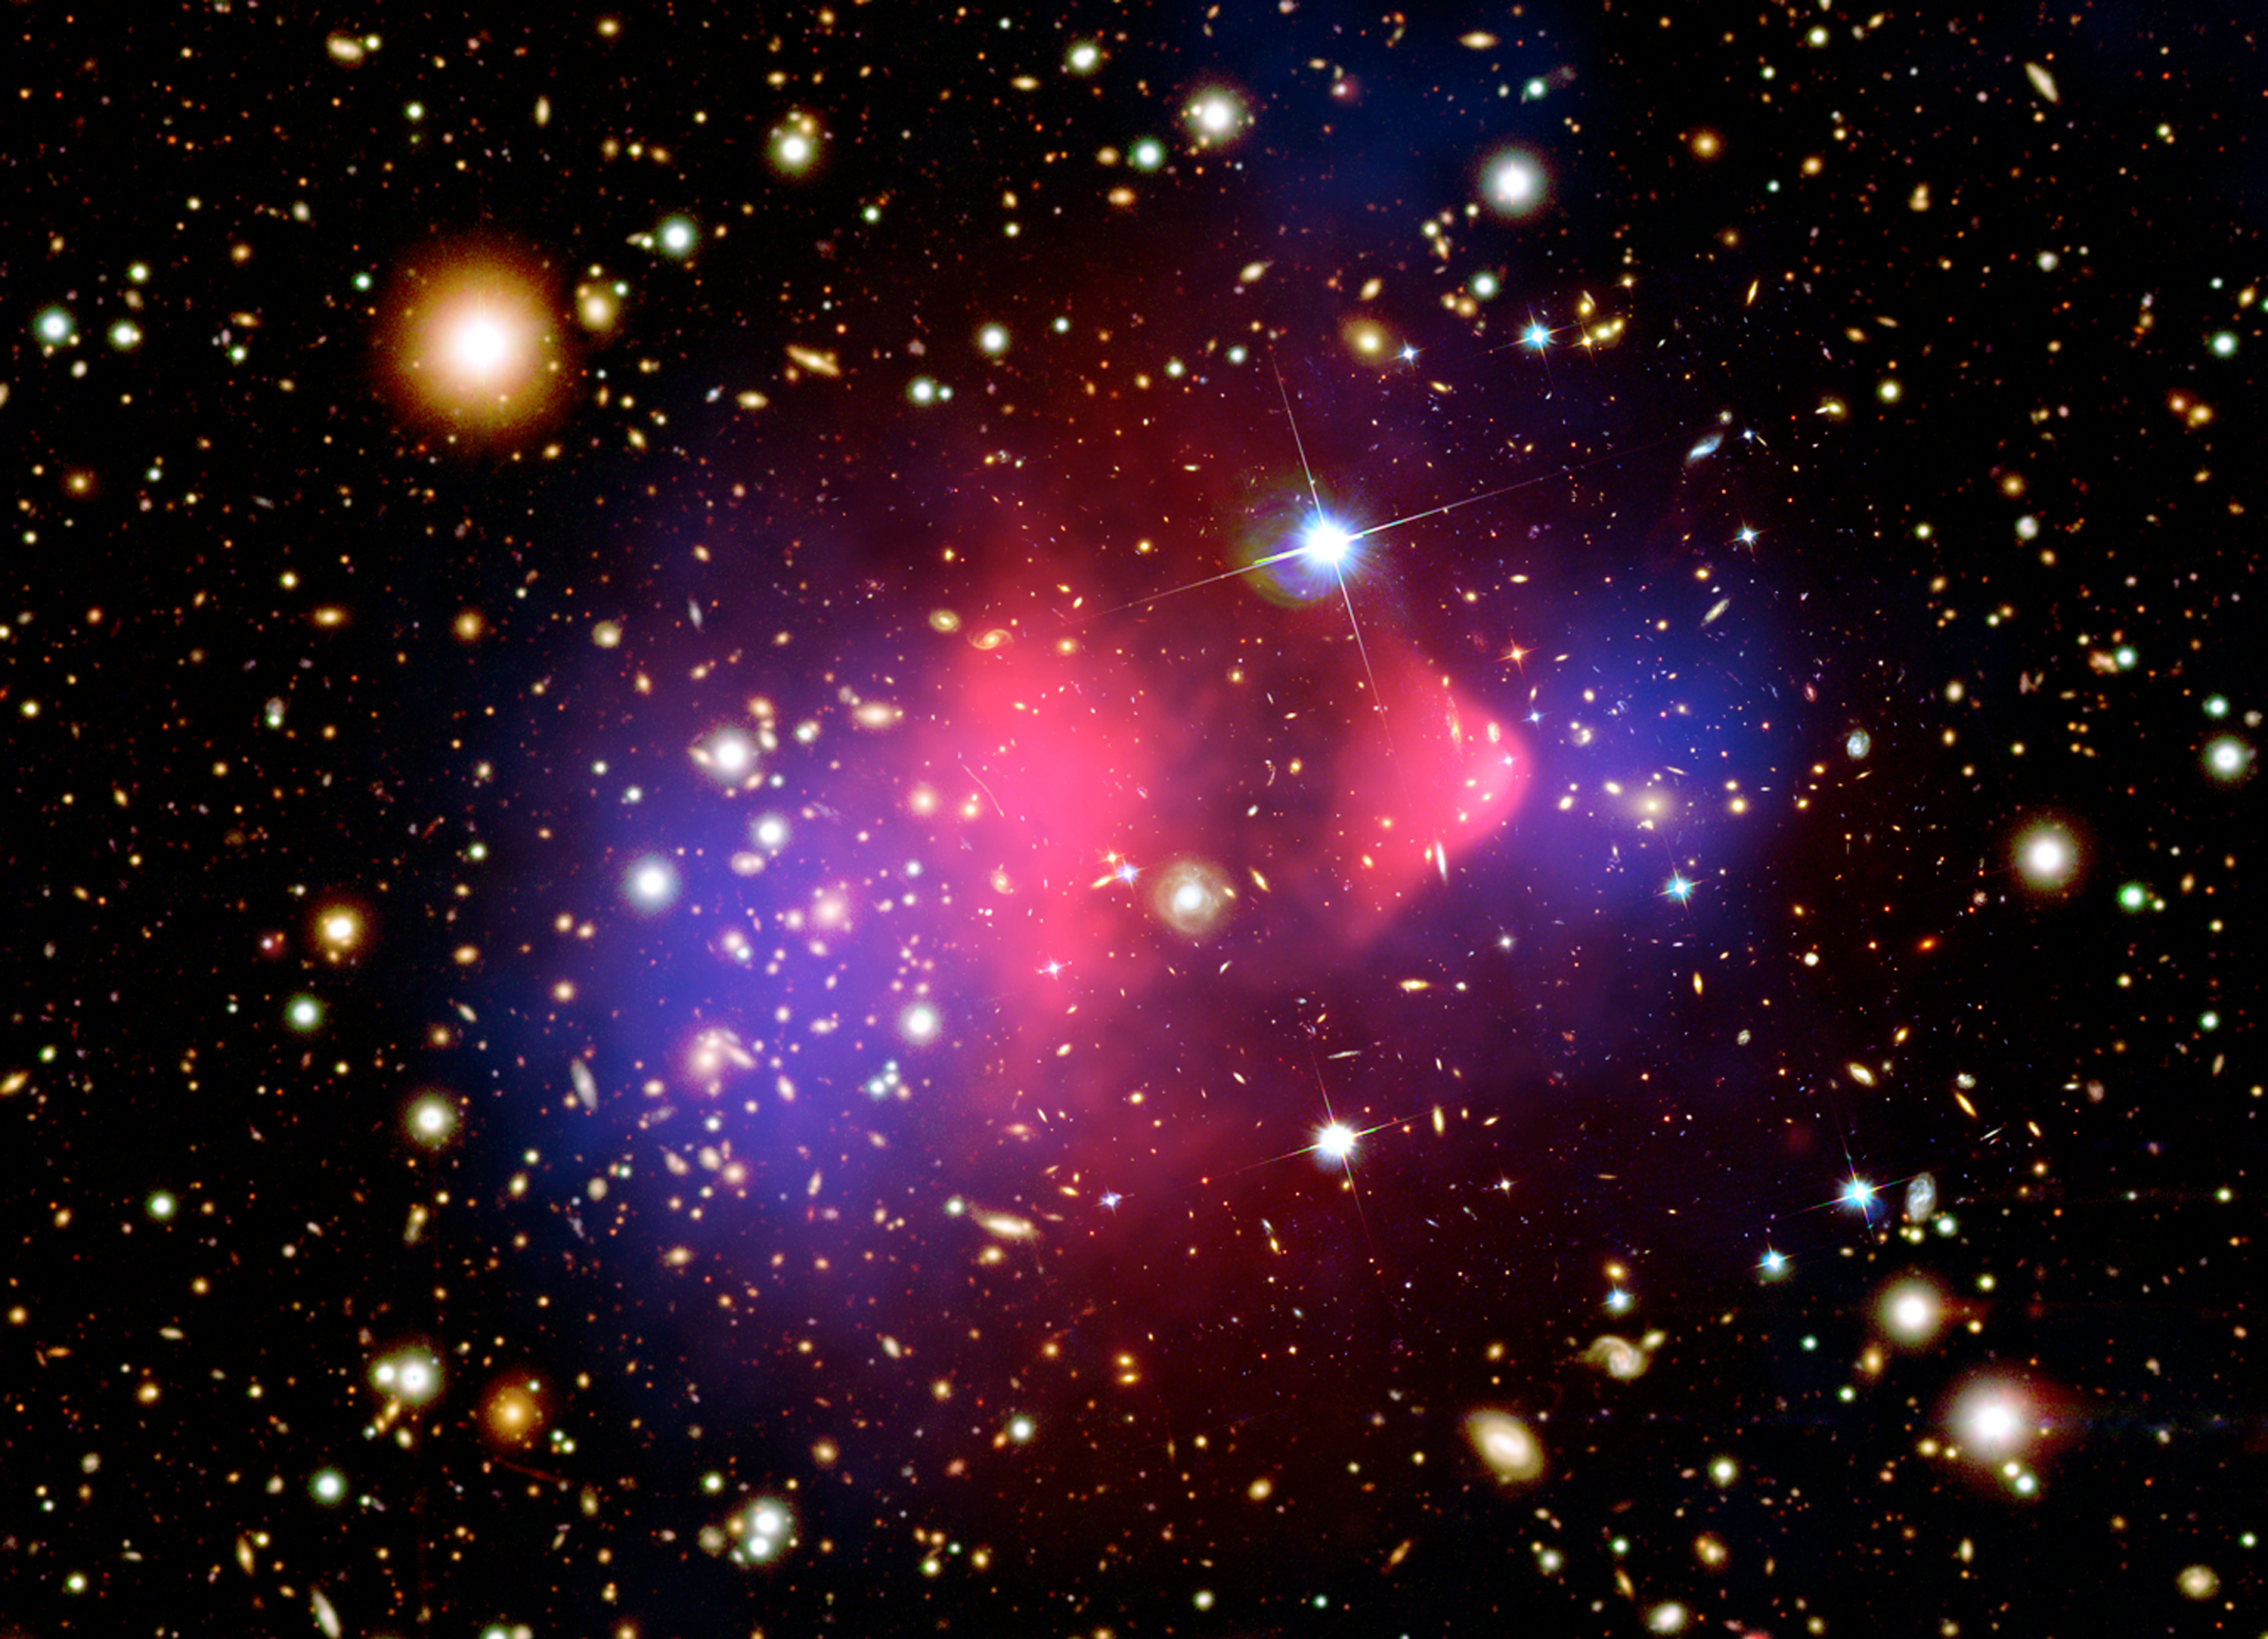

Visible-light and x-ray composite image of galaxy cluster 1E 0657-556

This composite image shows the galaxy cluster 1E 0657-556, also known as the "bullet cluster." This cluster was formed after the collision of two large clusters of galaxies, the most energetic event known in the universe since the Big Bang.

Hot gas detected by Chandra in X-rays is seen as two pink clumps in the image and contains most of the "normal," or baryonic, matter in the two clusters. The bullet-shaped clump on the right is the hot gas from one cluster, which passed through the hot gas from the other larger cluster during the collision. An optical image from Magellan and the Hubble Space Telescope shows the galaxies in orange and white. The blue areas in this image depict where astronomers find most of the mass in the clusters. The concentration of mass is determined by analyzing the effect of so-called gravitational lensing, where light from the distant objects is distorted by intervening matter. Most of the matter in the clusters (blue) is clearly separate from the normal matter (pink), giving direct evidence that nearly all of the matter in the clusters is dark.

The hot gas in each cluster was slowed by a drag force, similar to air resistance, during the collision. In contrast, the dark matter was not slowed by the impact because it does not interact directly with itself or the gas except through gravity. Therefore, during the collision the dark matter clumps from the two clusters moved ahead of the hot gas, producing the separation of the dark and normal matter seen in the image. If hot gas was the most massive component in the clusters, as proposed by alternative theories of gravity, such an effect would not be seen. Instead, this result shows that dark matter is required.

Comparing the optical image with the blue emission shows that the most of the galaxies in each cluster are located near the two dark matter clumps. This shows that the galaxies in each cluster did not slow down because of the collision, unlike the hot gas.

Credit: X-ray: NASA/CXC/M.Markevitch et al.Optical: NASA/STScI; Magellan/U.Arizona/D.Clowe et al.Lensing Map: NASA/STScI; ESO WFI; Magellan/U.Arizona/D.Clowe et al.